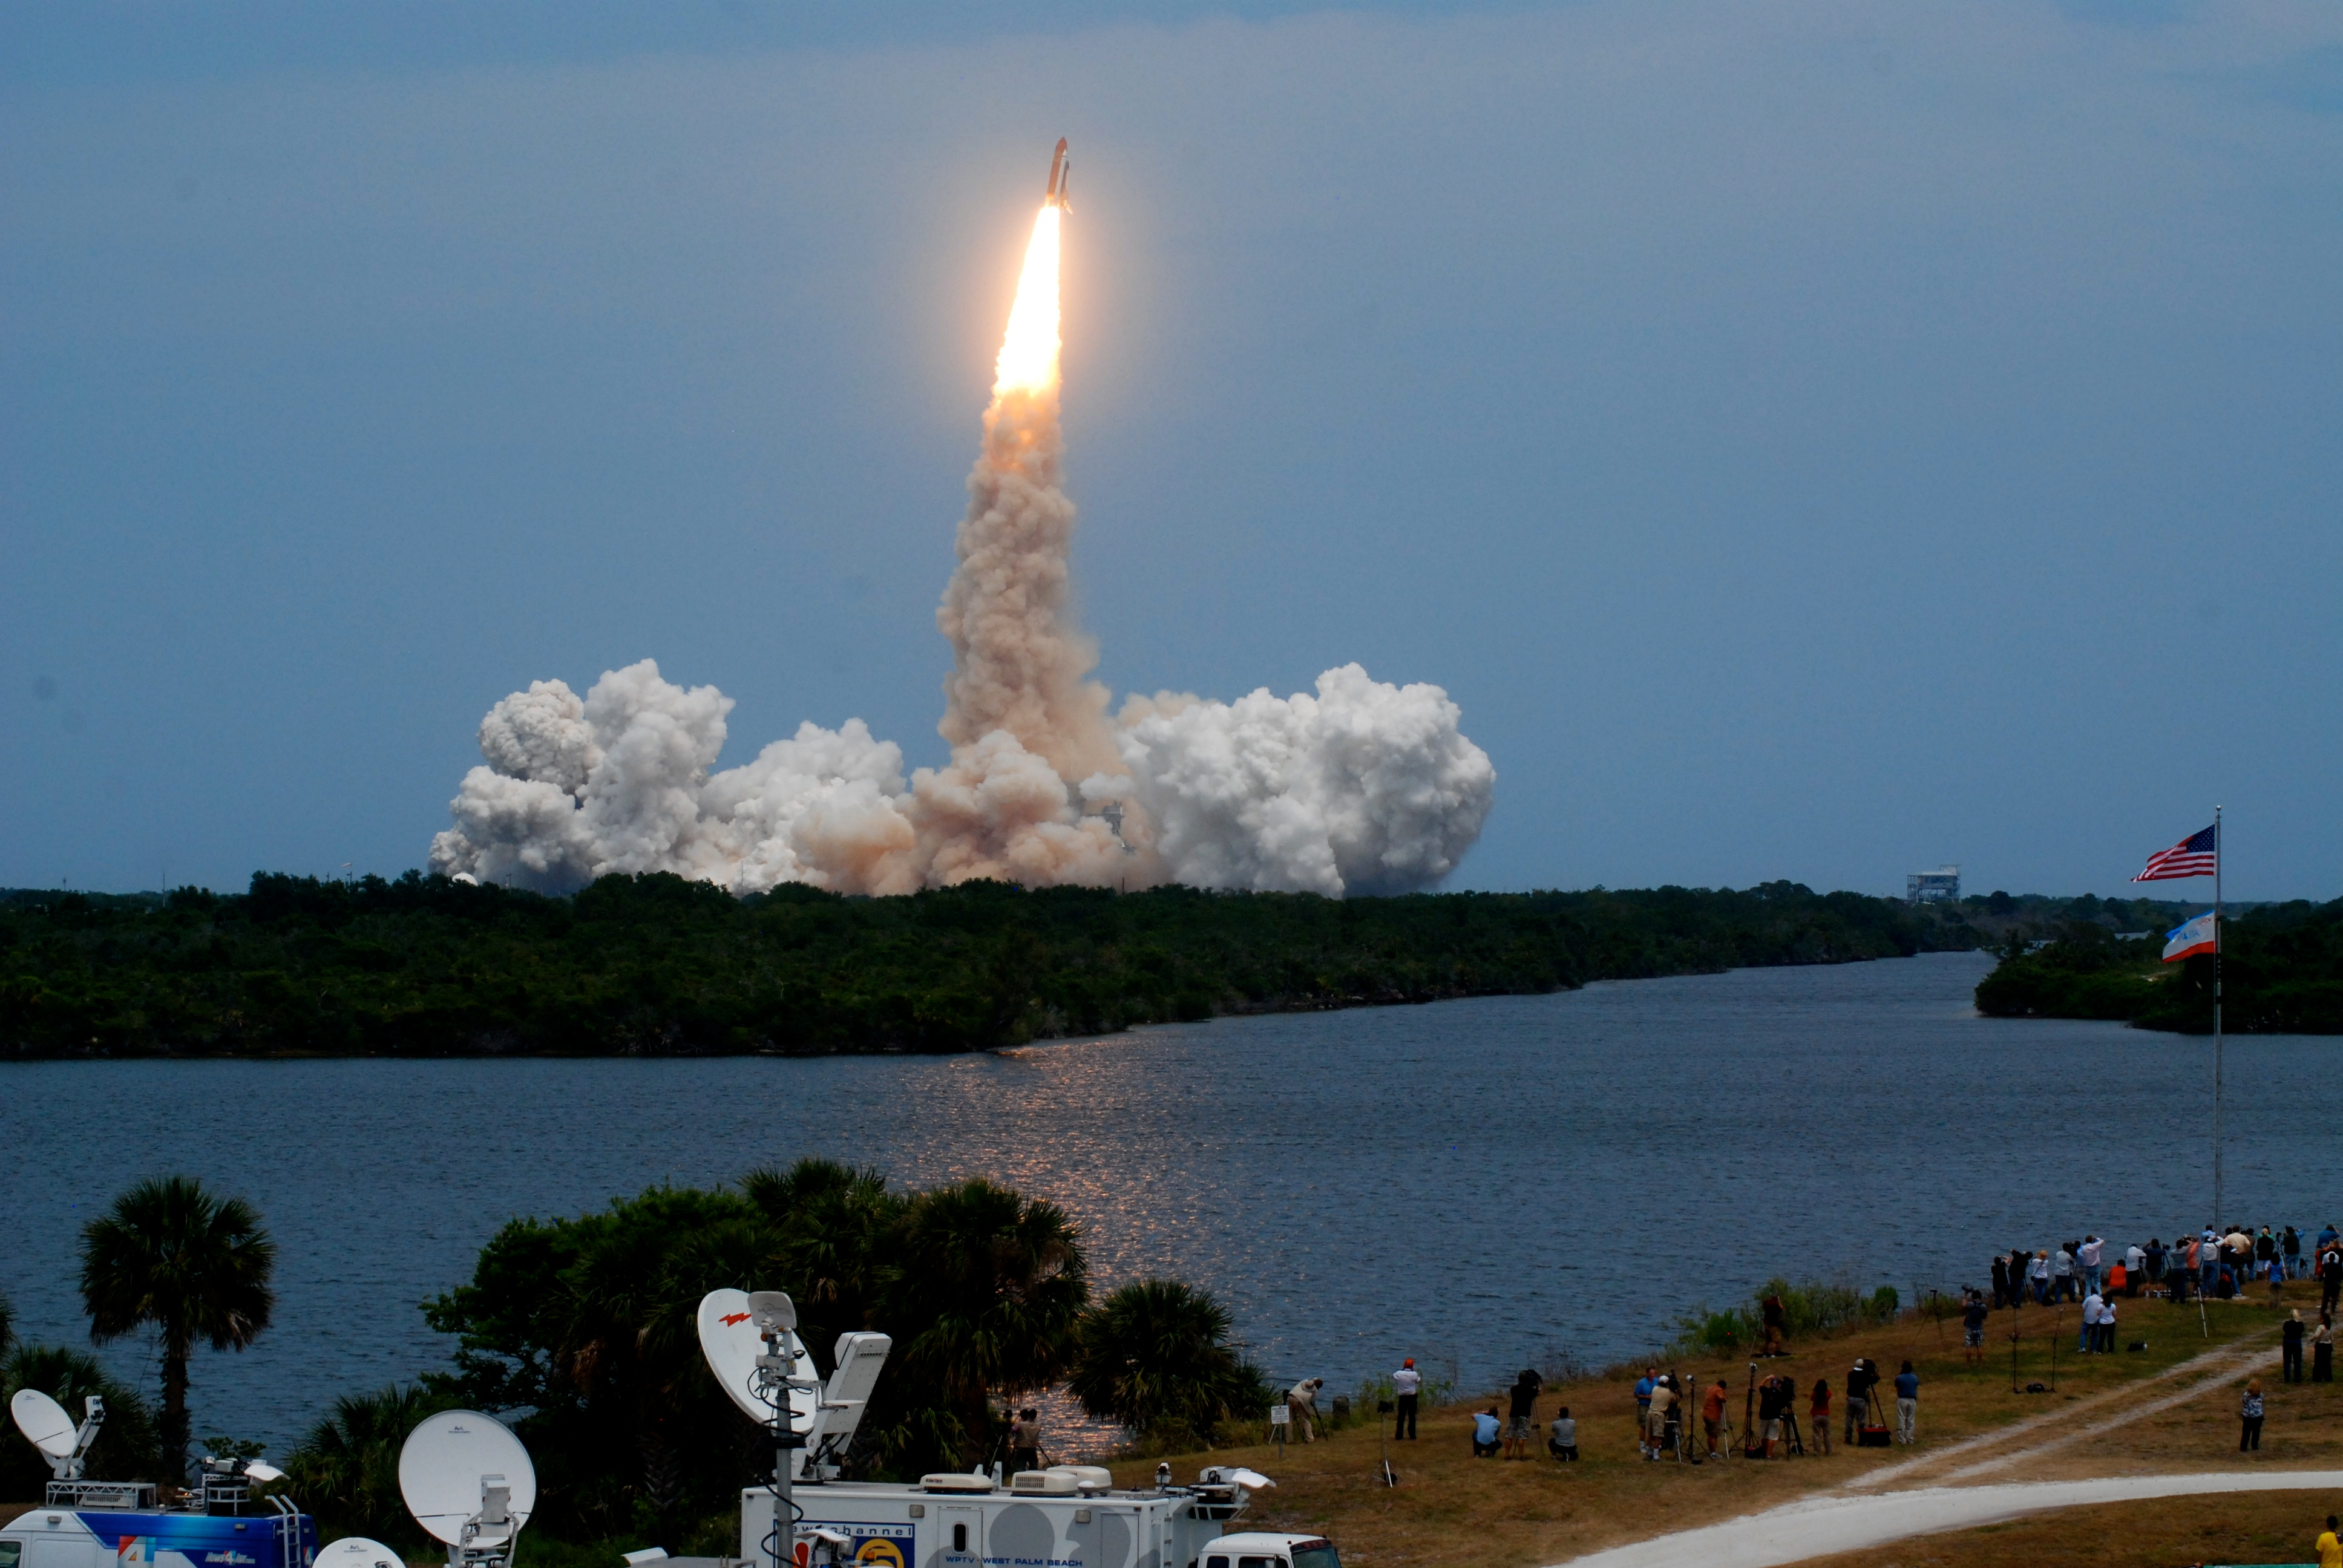

Space Shuttle Atlantis heads for Hubble

The start of Servicing Mission 4 began with a picture perfect liftoff from Kennedy Space Center.

Credit: ESA/Hubble and Ray Villard